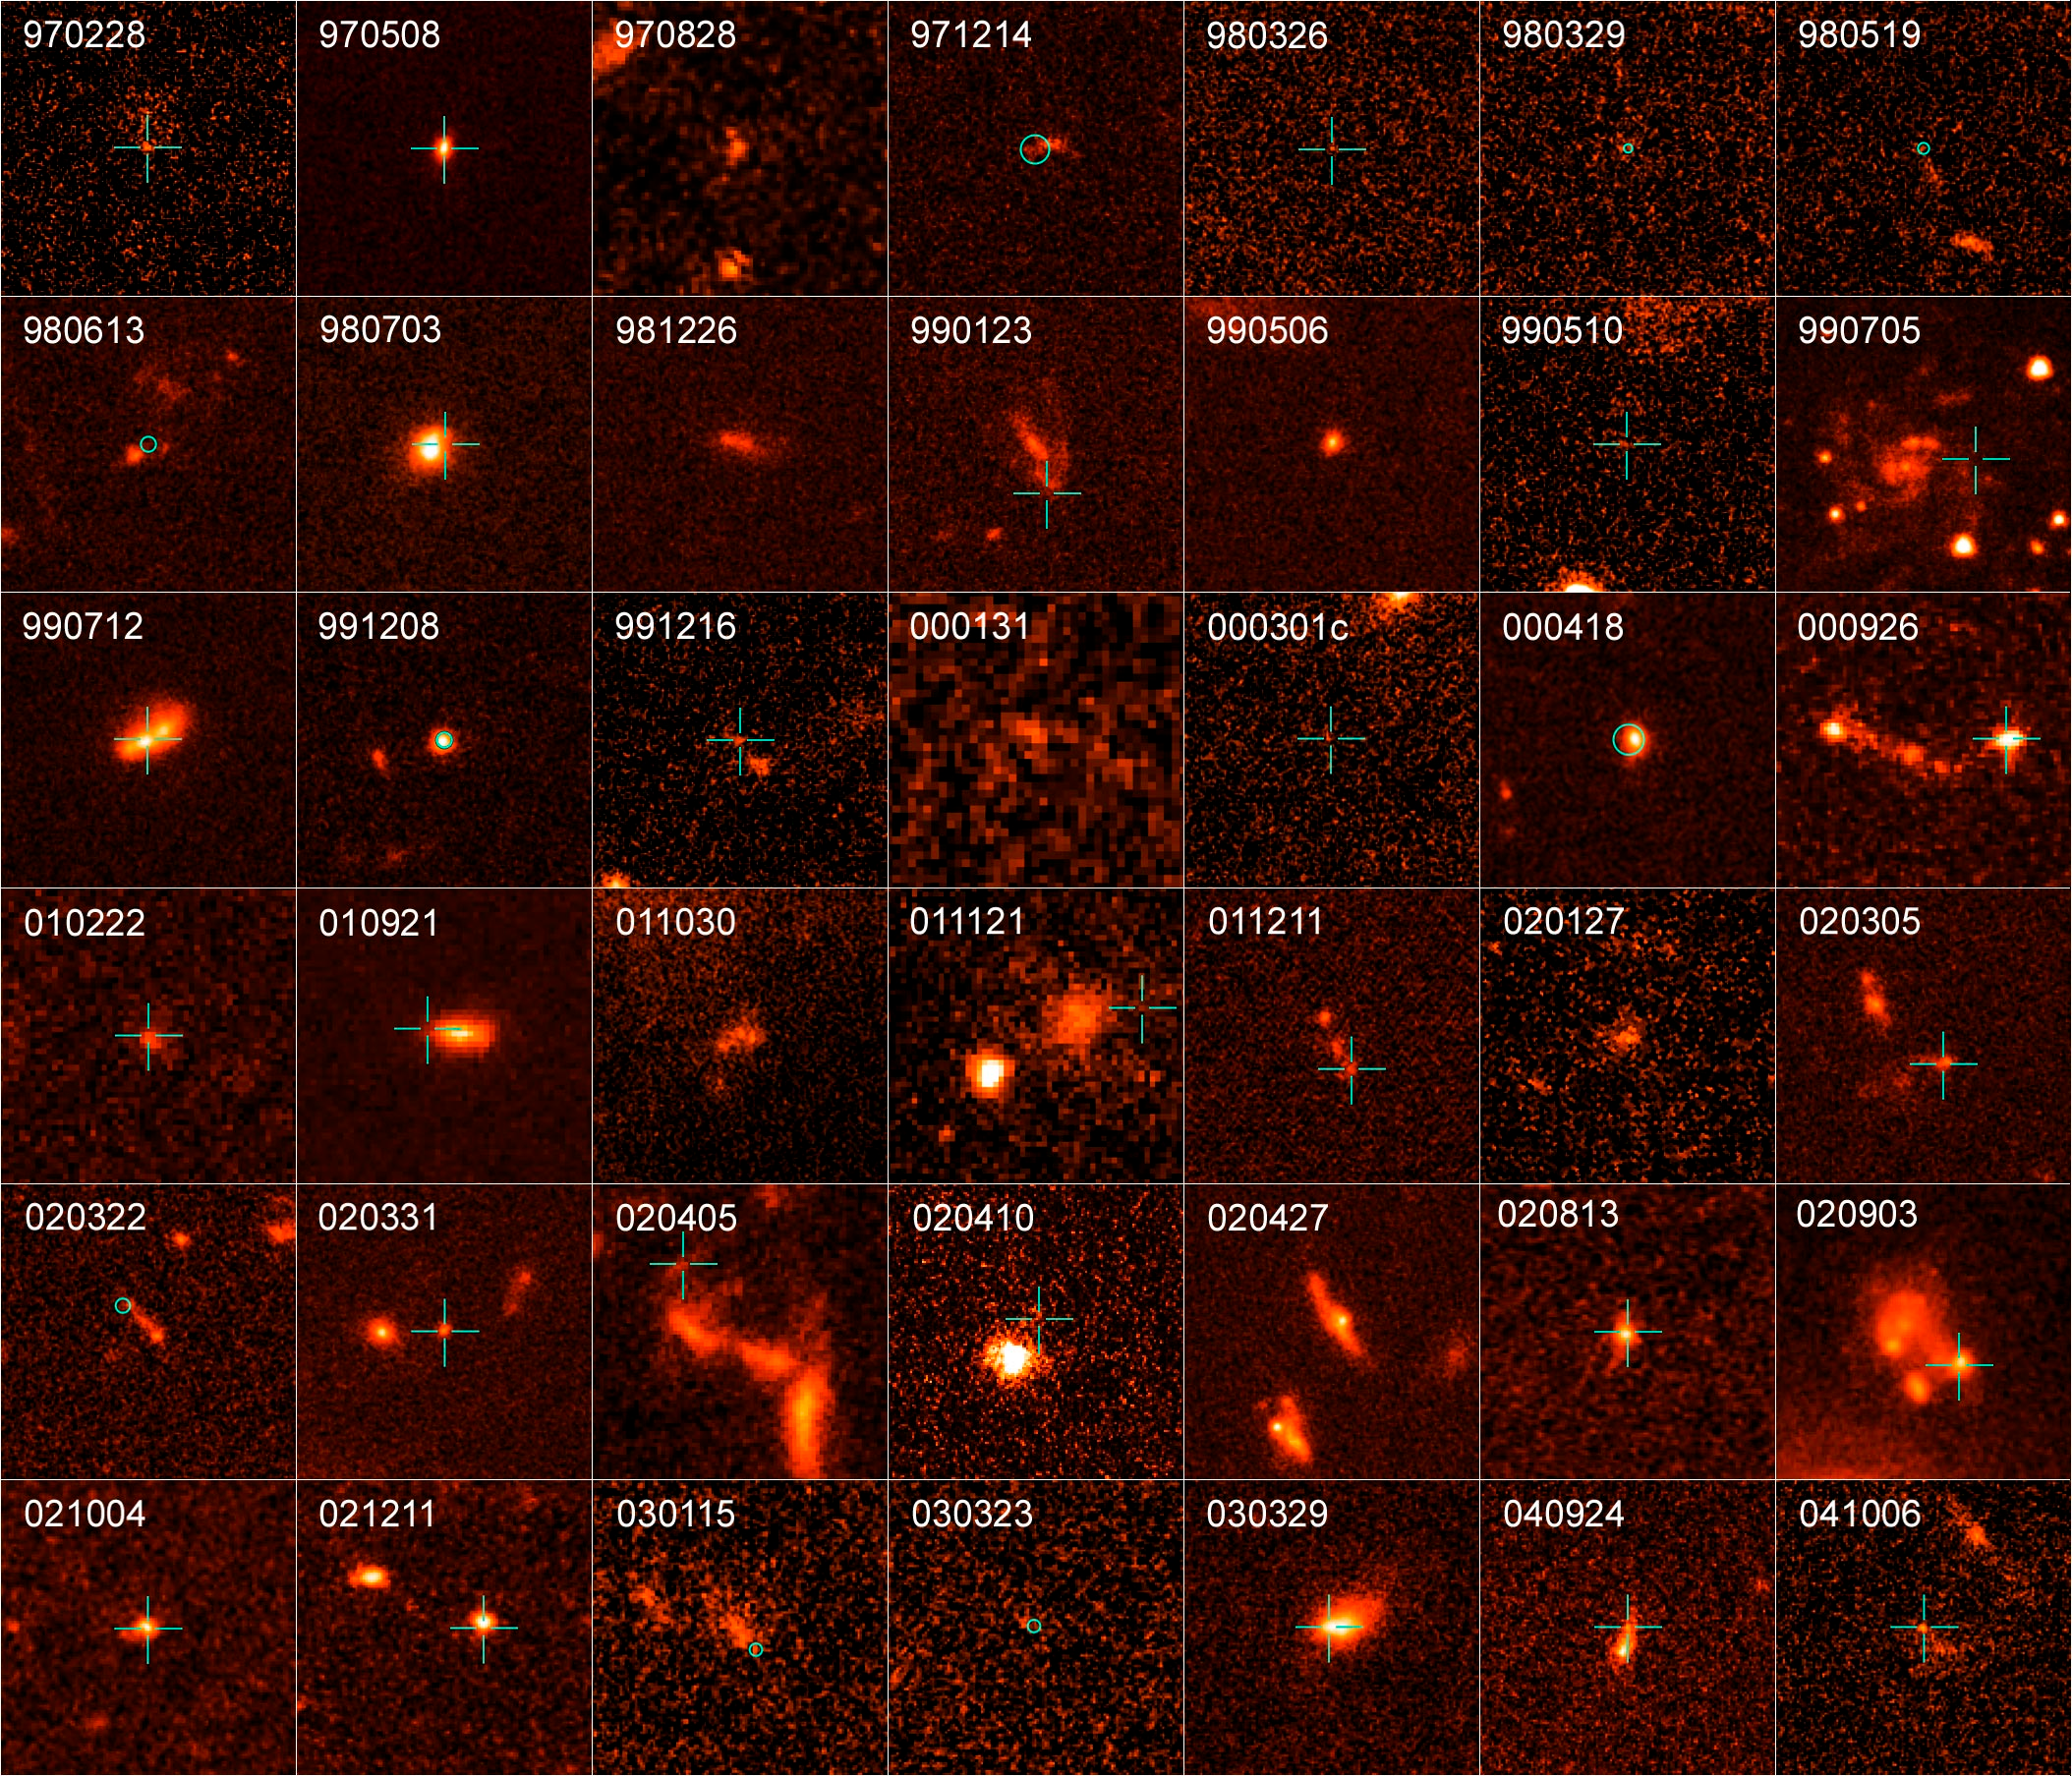

All GRBs in study

Homeowners may have to worry about floods, hurricanes, and tornadoes destroying their homes, but at least they can remove long-duration gamma-ray bursts (GRBs) from their list of potential natural disasters, according to recent findings by NASA’s Hubble Space Telescope.

Credit: NASA, ESA, A. Fruchter (STScI), A. Levan (Leicester University), and the GOSH Collaboration